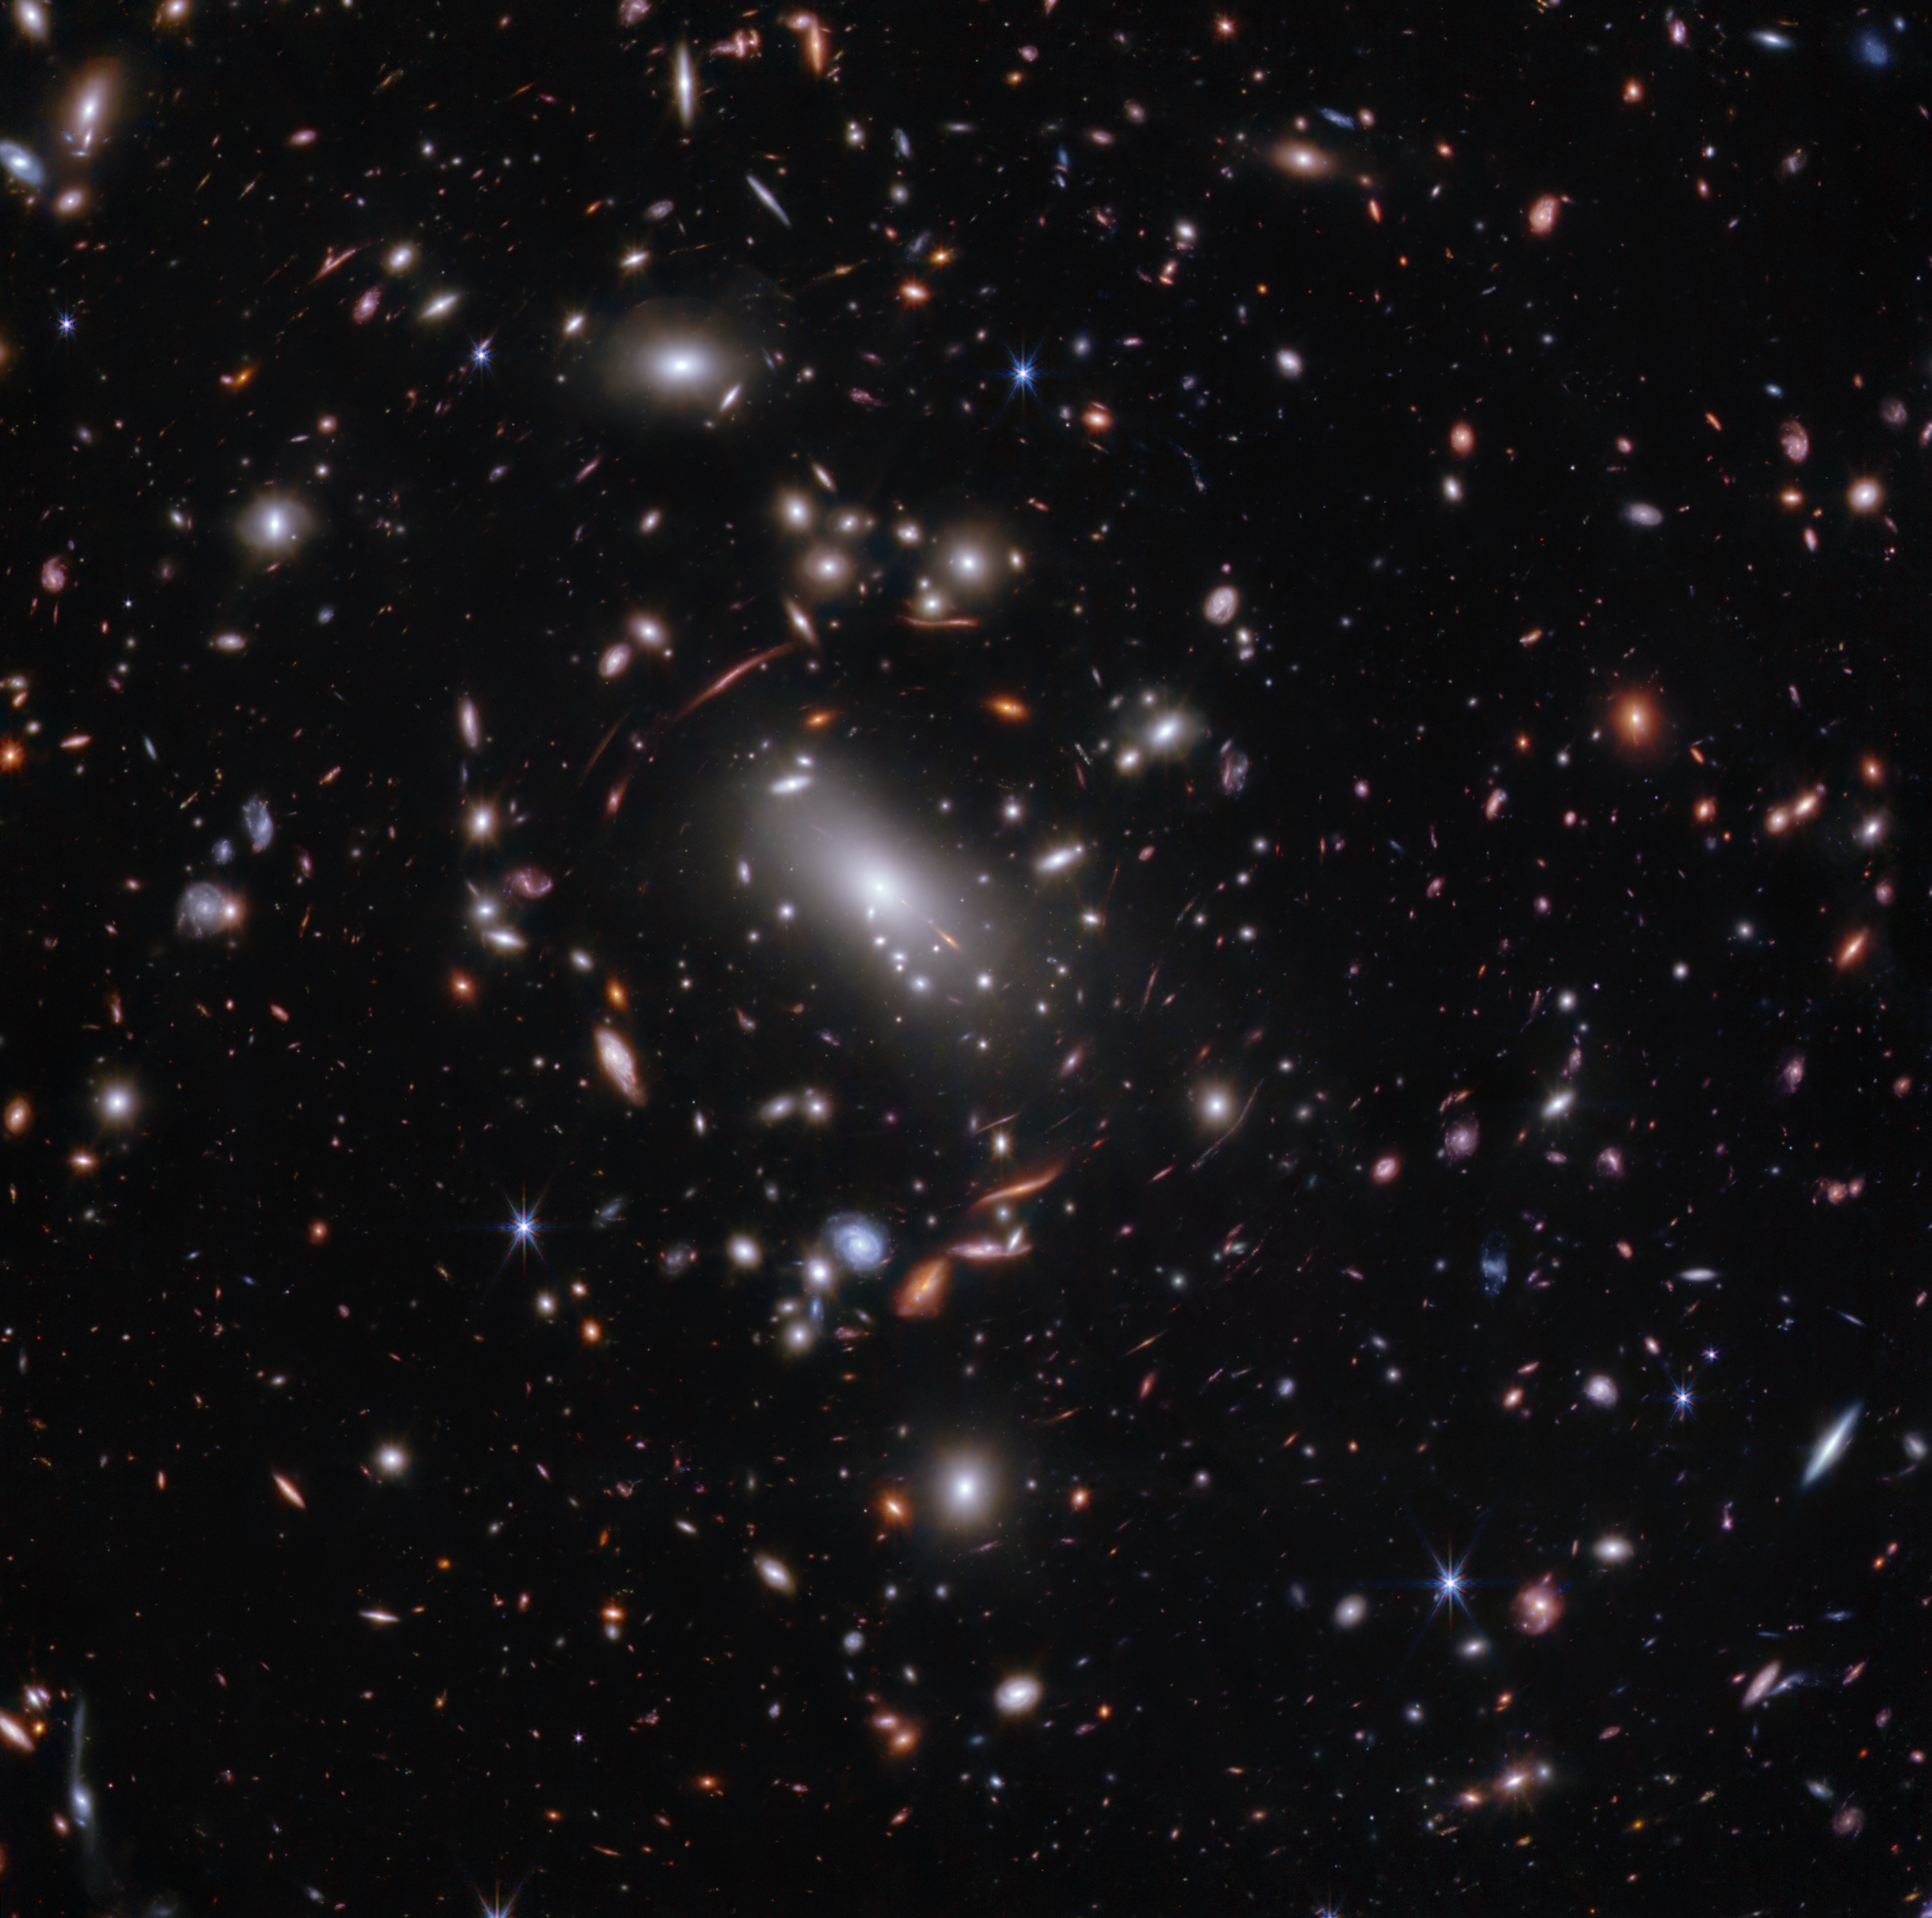

Galaxy cluster MACS J1423 (NIRCam image)

Thousands of glimmering galaxies are bound together by their own gravity, making up a massive cluster formally classified as MACS J1423.

The largest bright white oval is a supergiant elliptical galaxy that is the dominant member of this galaxy cluster. The galaxy cluster acts like a lens, magnifying and distorting the light from objects that lie well behind it, an effect known as gravitational lensing that has big research benefits. Astronomers can study lensed galaxies in detail, like the Firefly Sparkle galaxy.

This 2023 image is from the James Webb Space Telescope’s NIRCam (Near-InfraRed Camera). Researchers used Webb to survey the same field that the Hubble Space Telescope imaged in 2010. Thanks to its specialisation in high-resolution near-infrared imagery, Webb was able to show researchers many more galaxies in far more detail.

Credit: NASA, ESA, CSA, STScI, C. Willott (NRC-Canada), L. Mowla (Wellesley College), K. Iyer (Columbia)